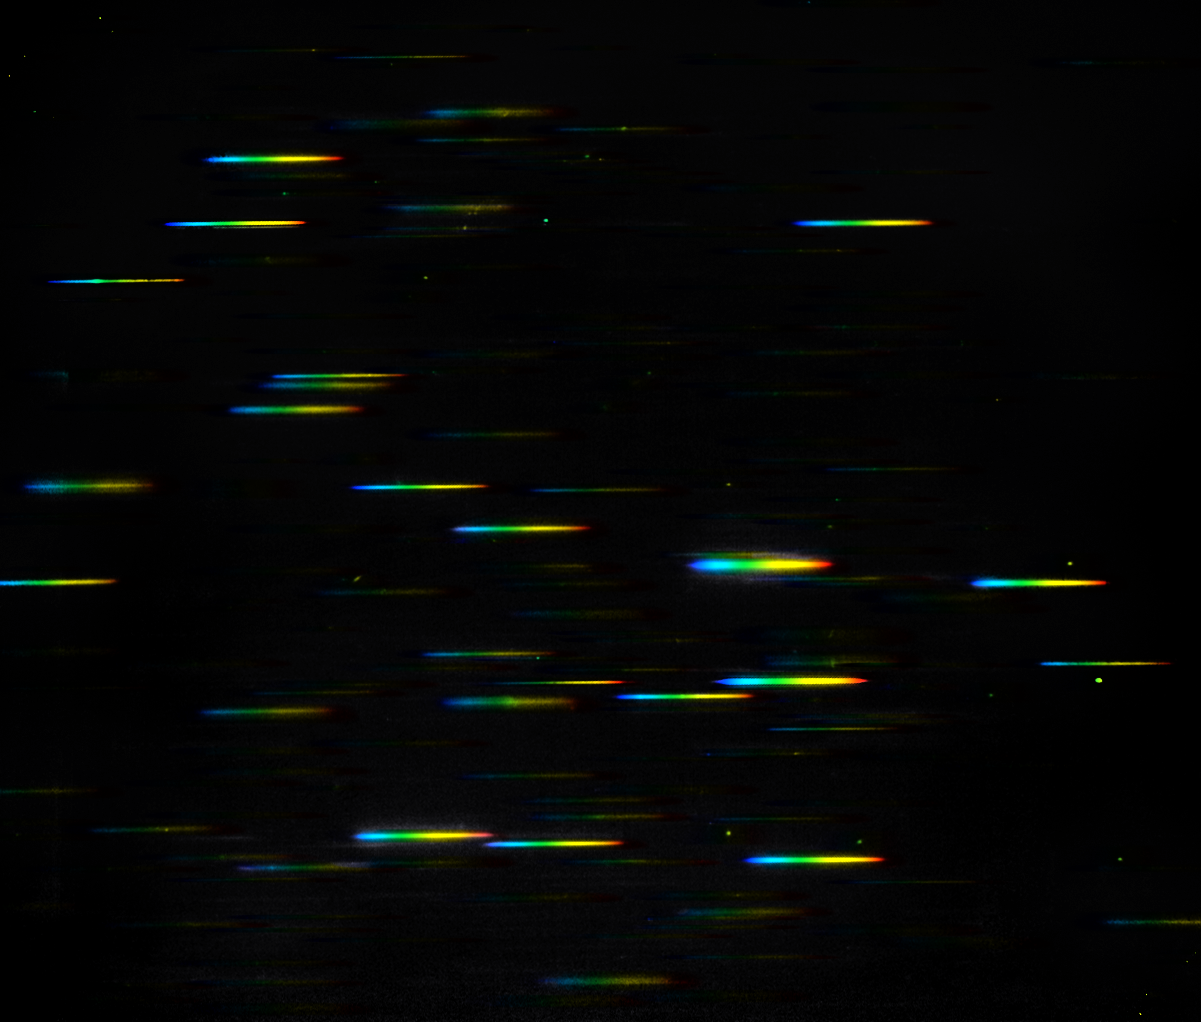

Concept illustration of a grism image

This image represents the data that comes from using the NASA/ESA Hubble Space Telescop's highly-sensitive Wide Field Camera 3 in its grism spectroscopy mode.

A grism is a combination of a grating and a prism, and it splits up the light from a galaxy into its constituent colours, producing a spectrum. In this image the continuum of each galaxy is shown as a "rainbow".

Astronomers can look at a galaxy’s spectrum and identify light emitted by the hydrogen gas in the galaxy. If there are stars being formed in the galaxy then the intense radiation from the newborn stars heats up the hydrogen gas and makes it glow.

All of the light from the hydrogen gas is emitted in a small number of very narrow and bright emission lines. For dwarf galaxies in the early Universe the emission lines are much easier to detect than the faint, almost invisible, continuum.

Credit: NASA & ESA